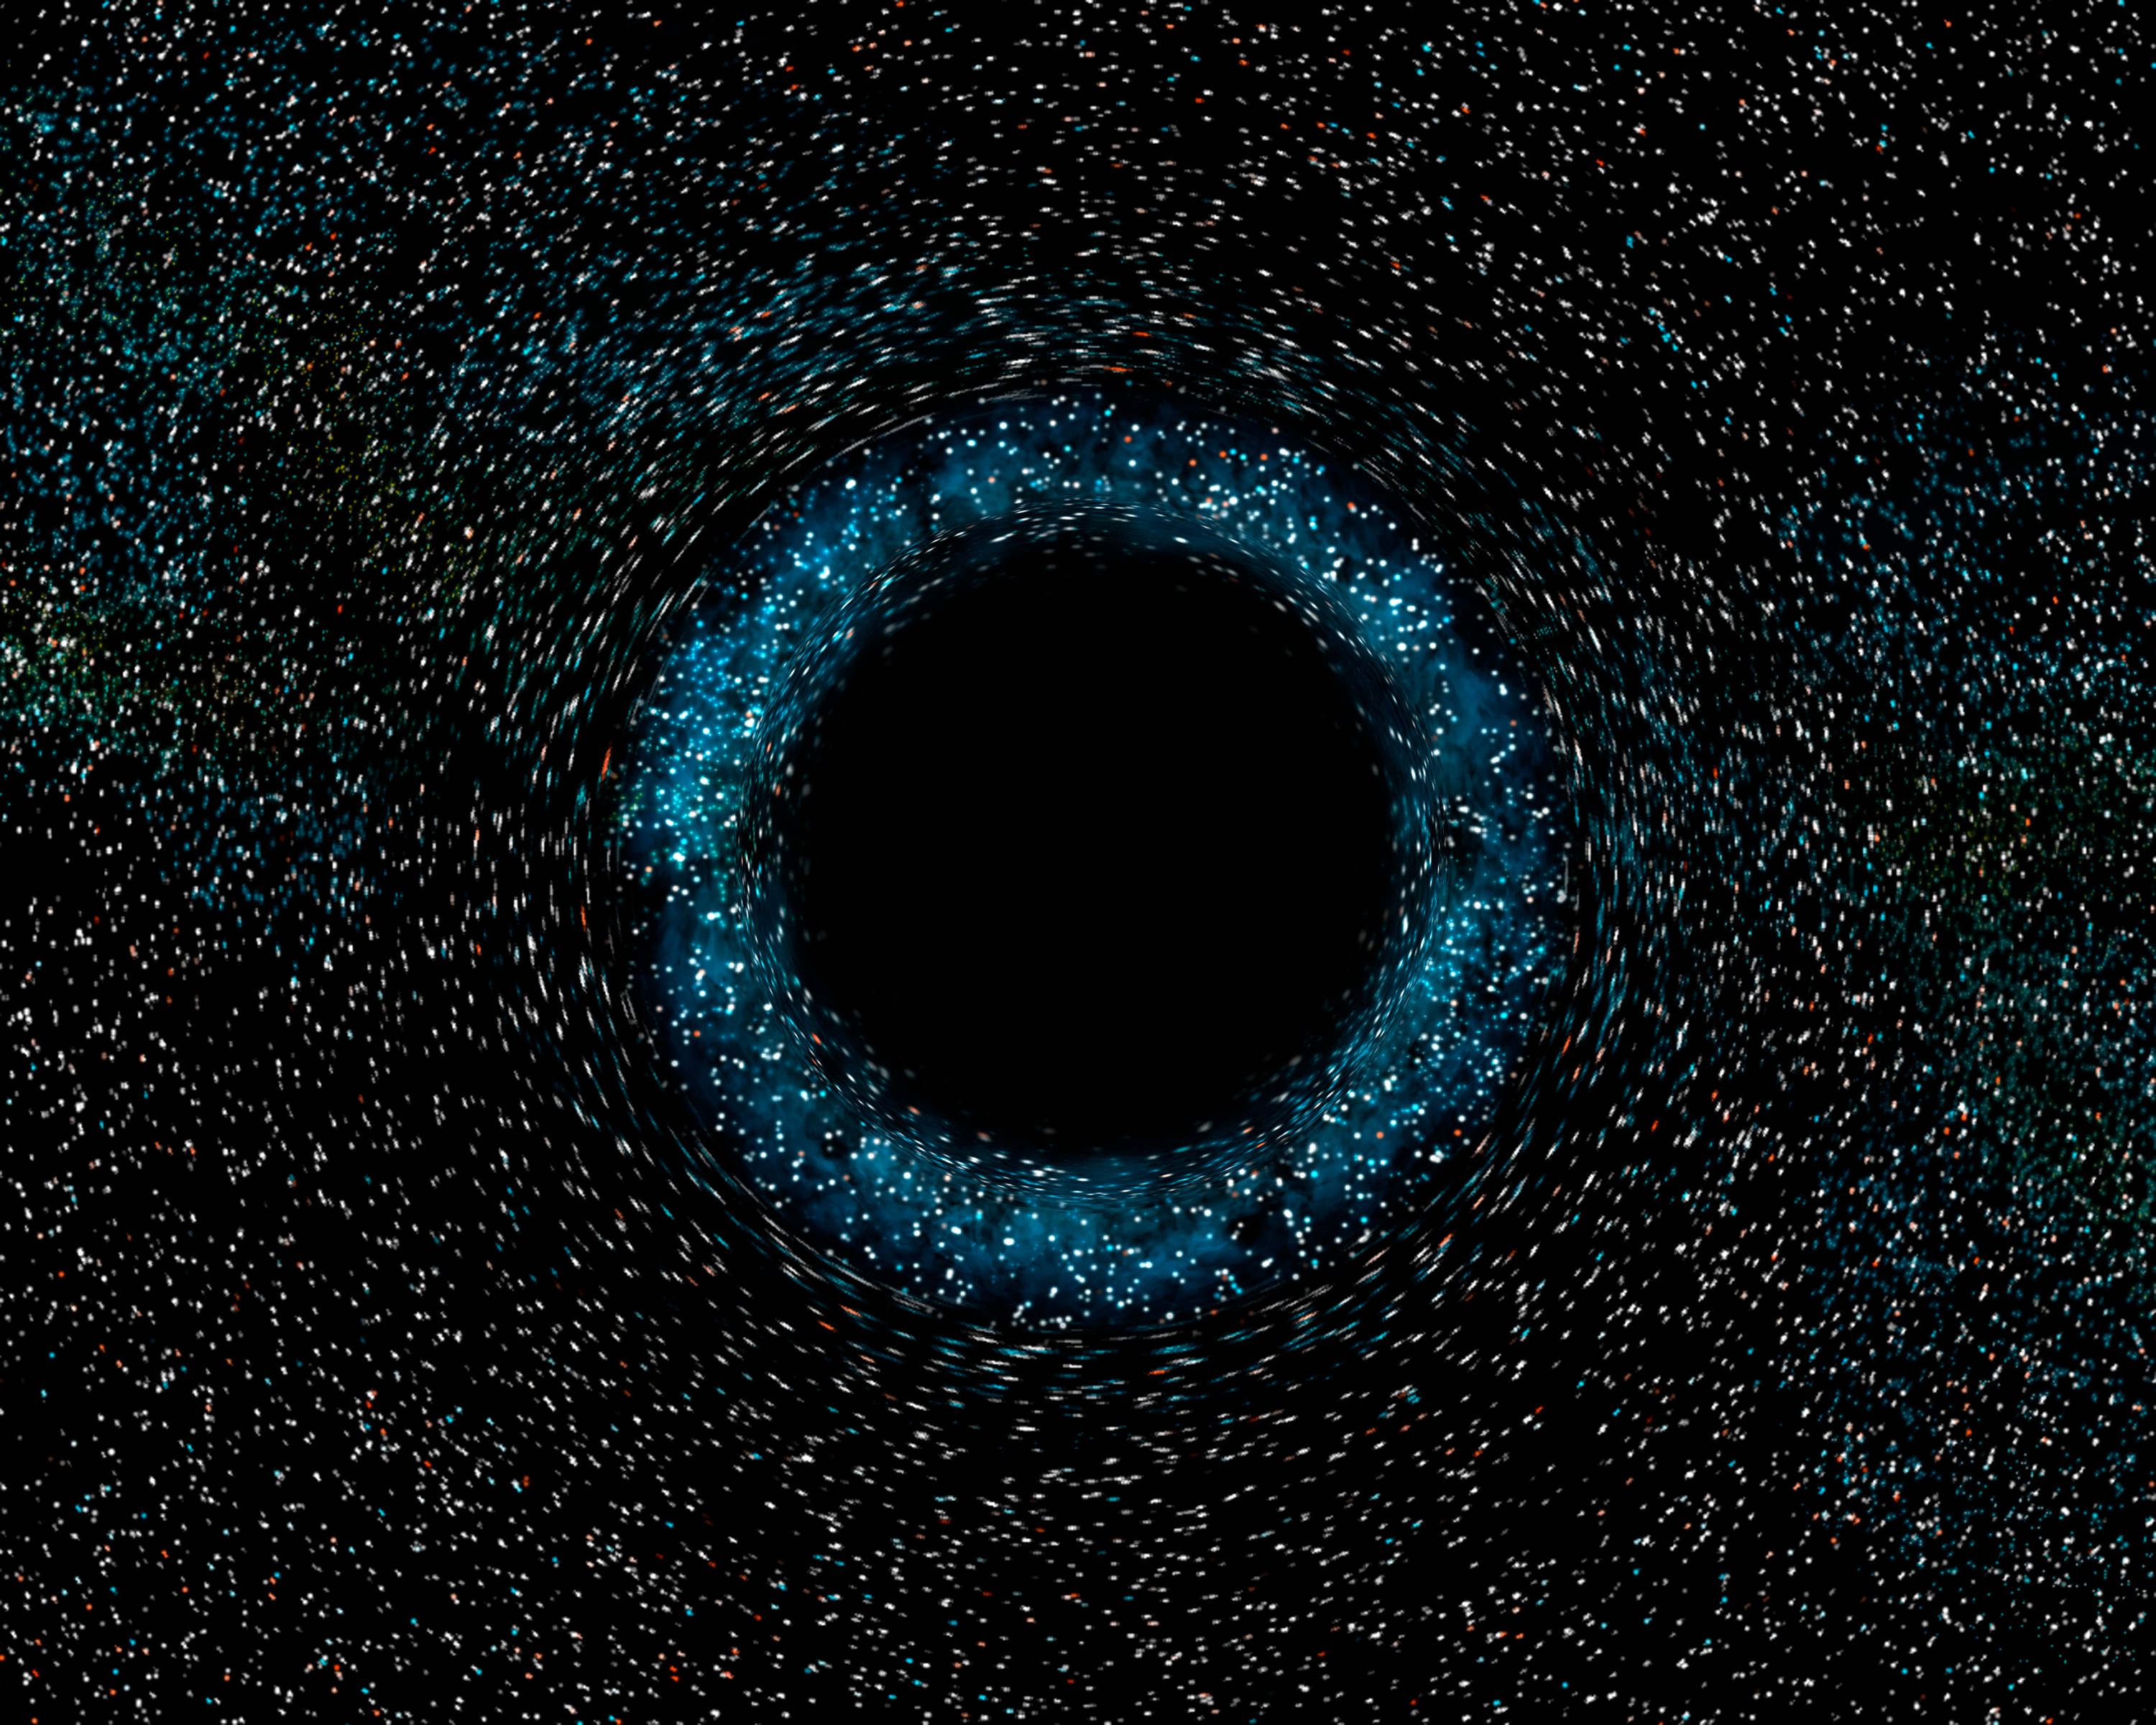

Black hole (artist's impression)

Artist's impression of a stellar-mass black hole.

Credit: European Space Agency, NASA and Felix Mirabel (the French Atomic Energy Commission & the Institute for Astronomy and Space Physics/Conicet of Argentina)